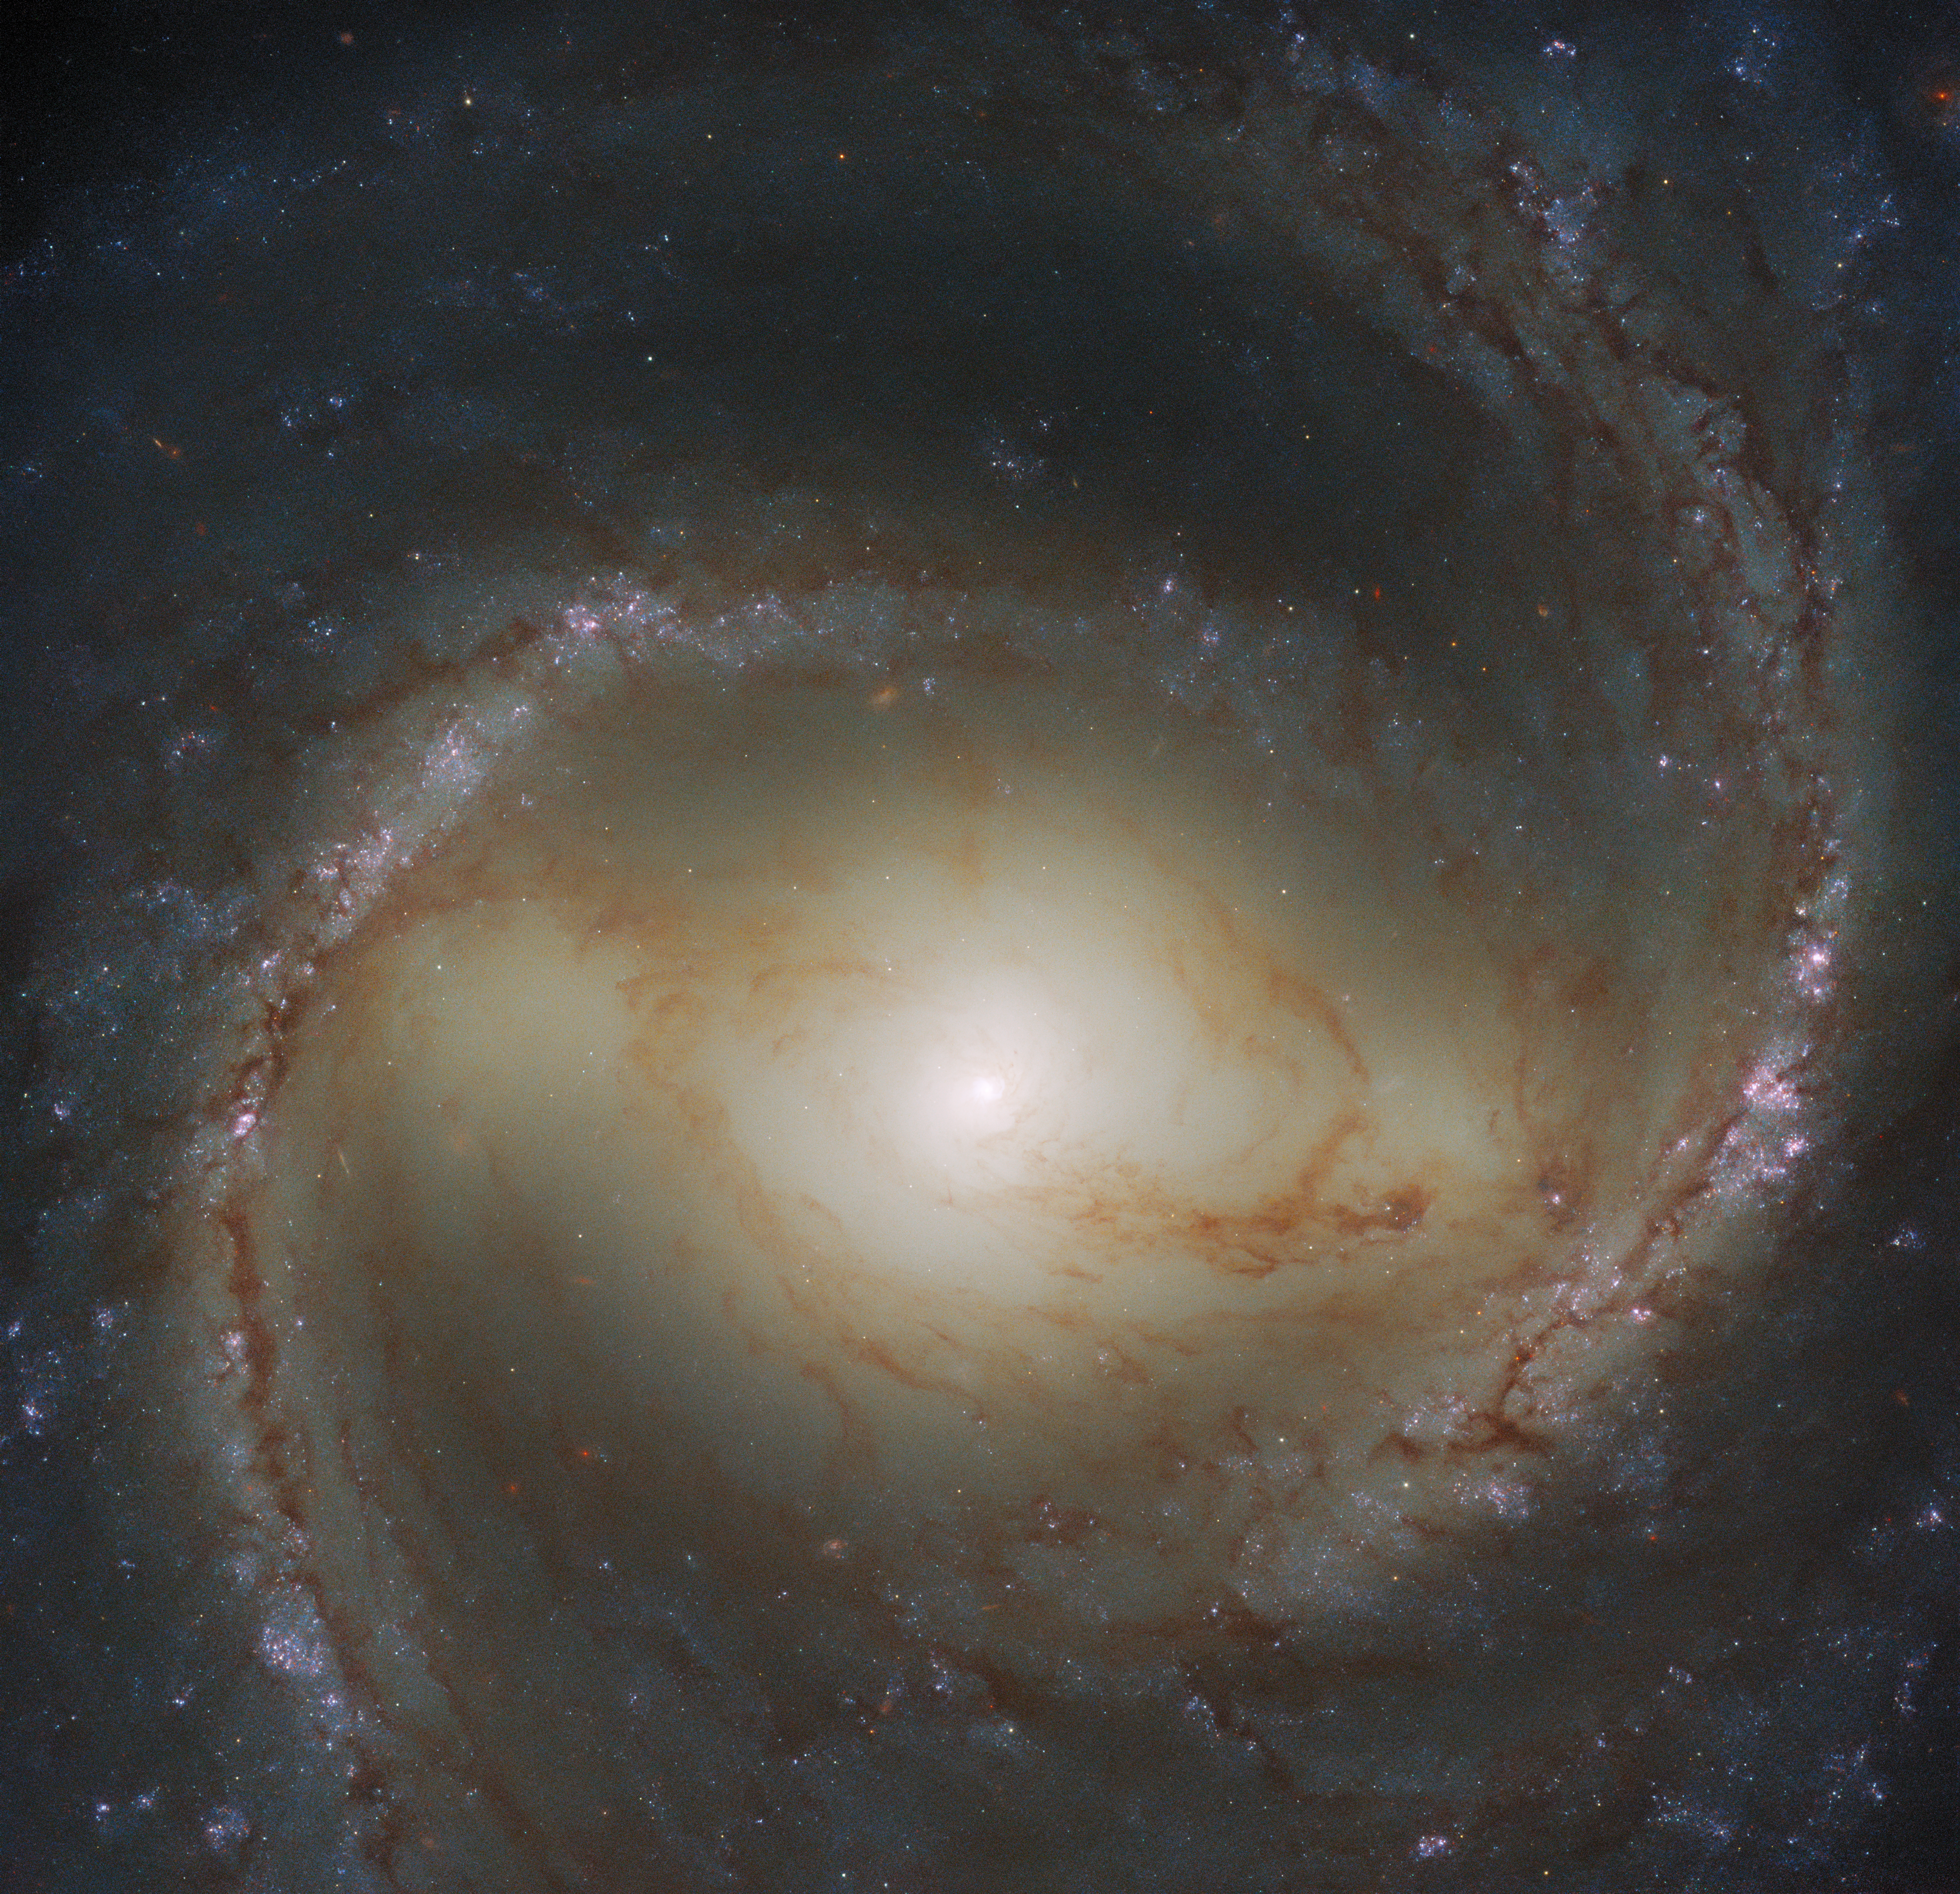

Spiral Snapshot

The spiral galaxy M91 fills the frame of this Wide Field Camera 3 observation from the NASA/ESA Hubble Space Telescope. M91 lies approximately 55 million light-years from Earth in the constellation Coma Berenices and — as is evident in this image — is a barred spiral galaxy. While M91’s prominent bar makes for a spectacular galactic portrait, it also hides an astronomical monstrosity. Like our own galaxy, M91 contains a supermassive black hole at its centre. A 2009 study using archival Hubble data found that this central black hole weighs somewhere between 9.6 and 38 million times as much as the Sun.

Whilst archival Hubble data allowed astronomers to weigh M91’s central black hole, more recent observations have had other scientific aims. This observation is part of an effort to build a treasure trove of astronomical data exploring the connections between young stars and the clouds of cold gas in which they form. To do this, astronomers used Hubble to obtain ultraviolet and visible observations of galaxies already seen at radio wavelengths by the ground-based Atacama Large Millimeter/submillimeter Array (ALMA).

Observing time with Hubble is a highly valued, and much sought-after, resource for astronomers. To obtain data from the telescope, astronomers first have to write a proposal detailing what they want to observe and highlighting the scientific importance of their observations. These proposals are then anonymised and judged on their scientific merit by a variety of astronomical experts. This process is incredibly competitive: following Hubble’s latest call for proposals, only around 13% of the proposals were awarded observing time.

Are you interested in finding out what Hubble is observing right now? You can follow the space telescope’s observations in real time at this link.

Credit: ESA/Hubble & NASA, J. Lee and the PHANGS-HST Team